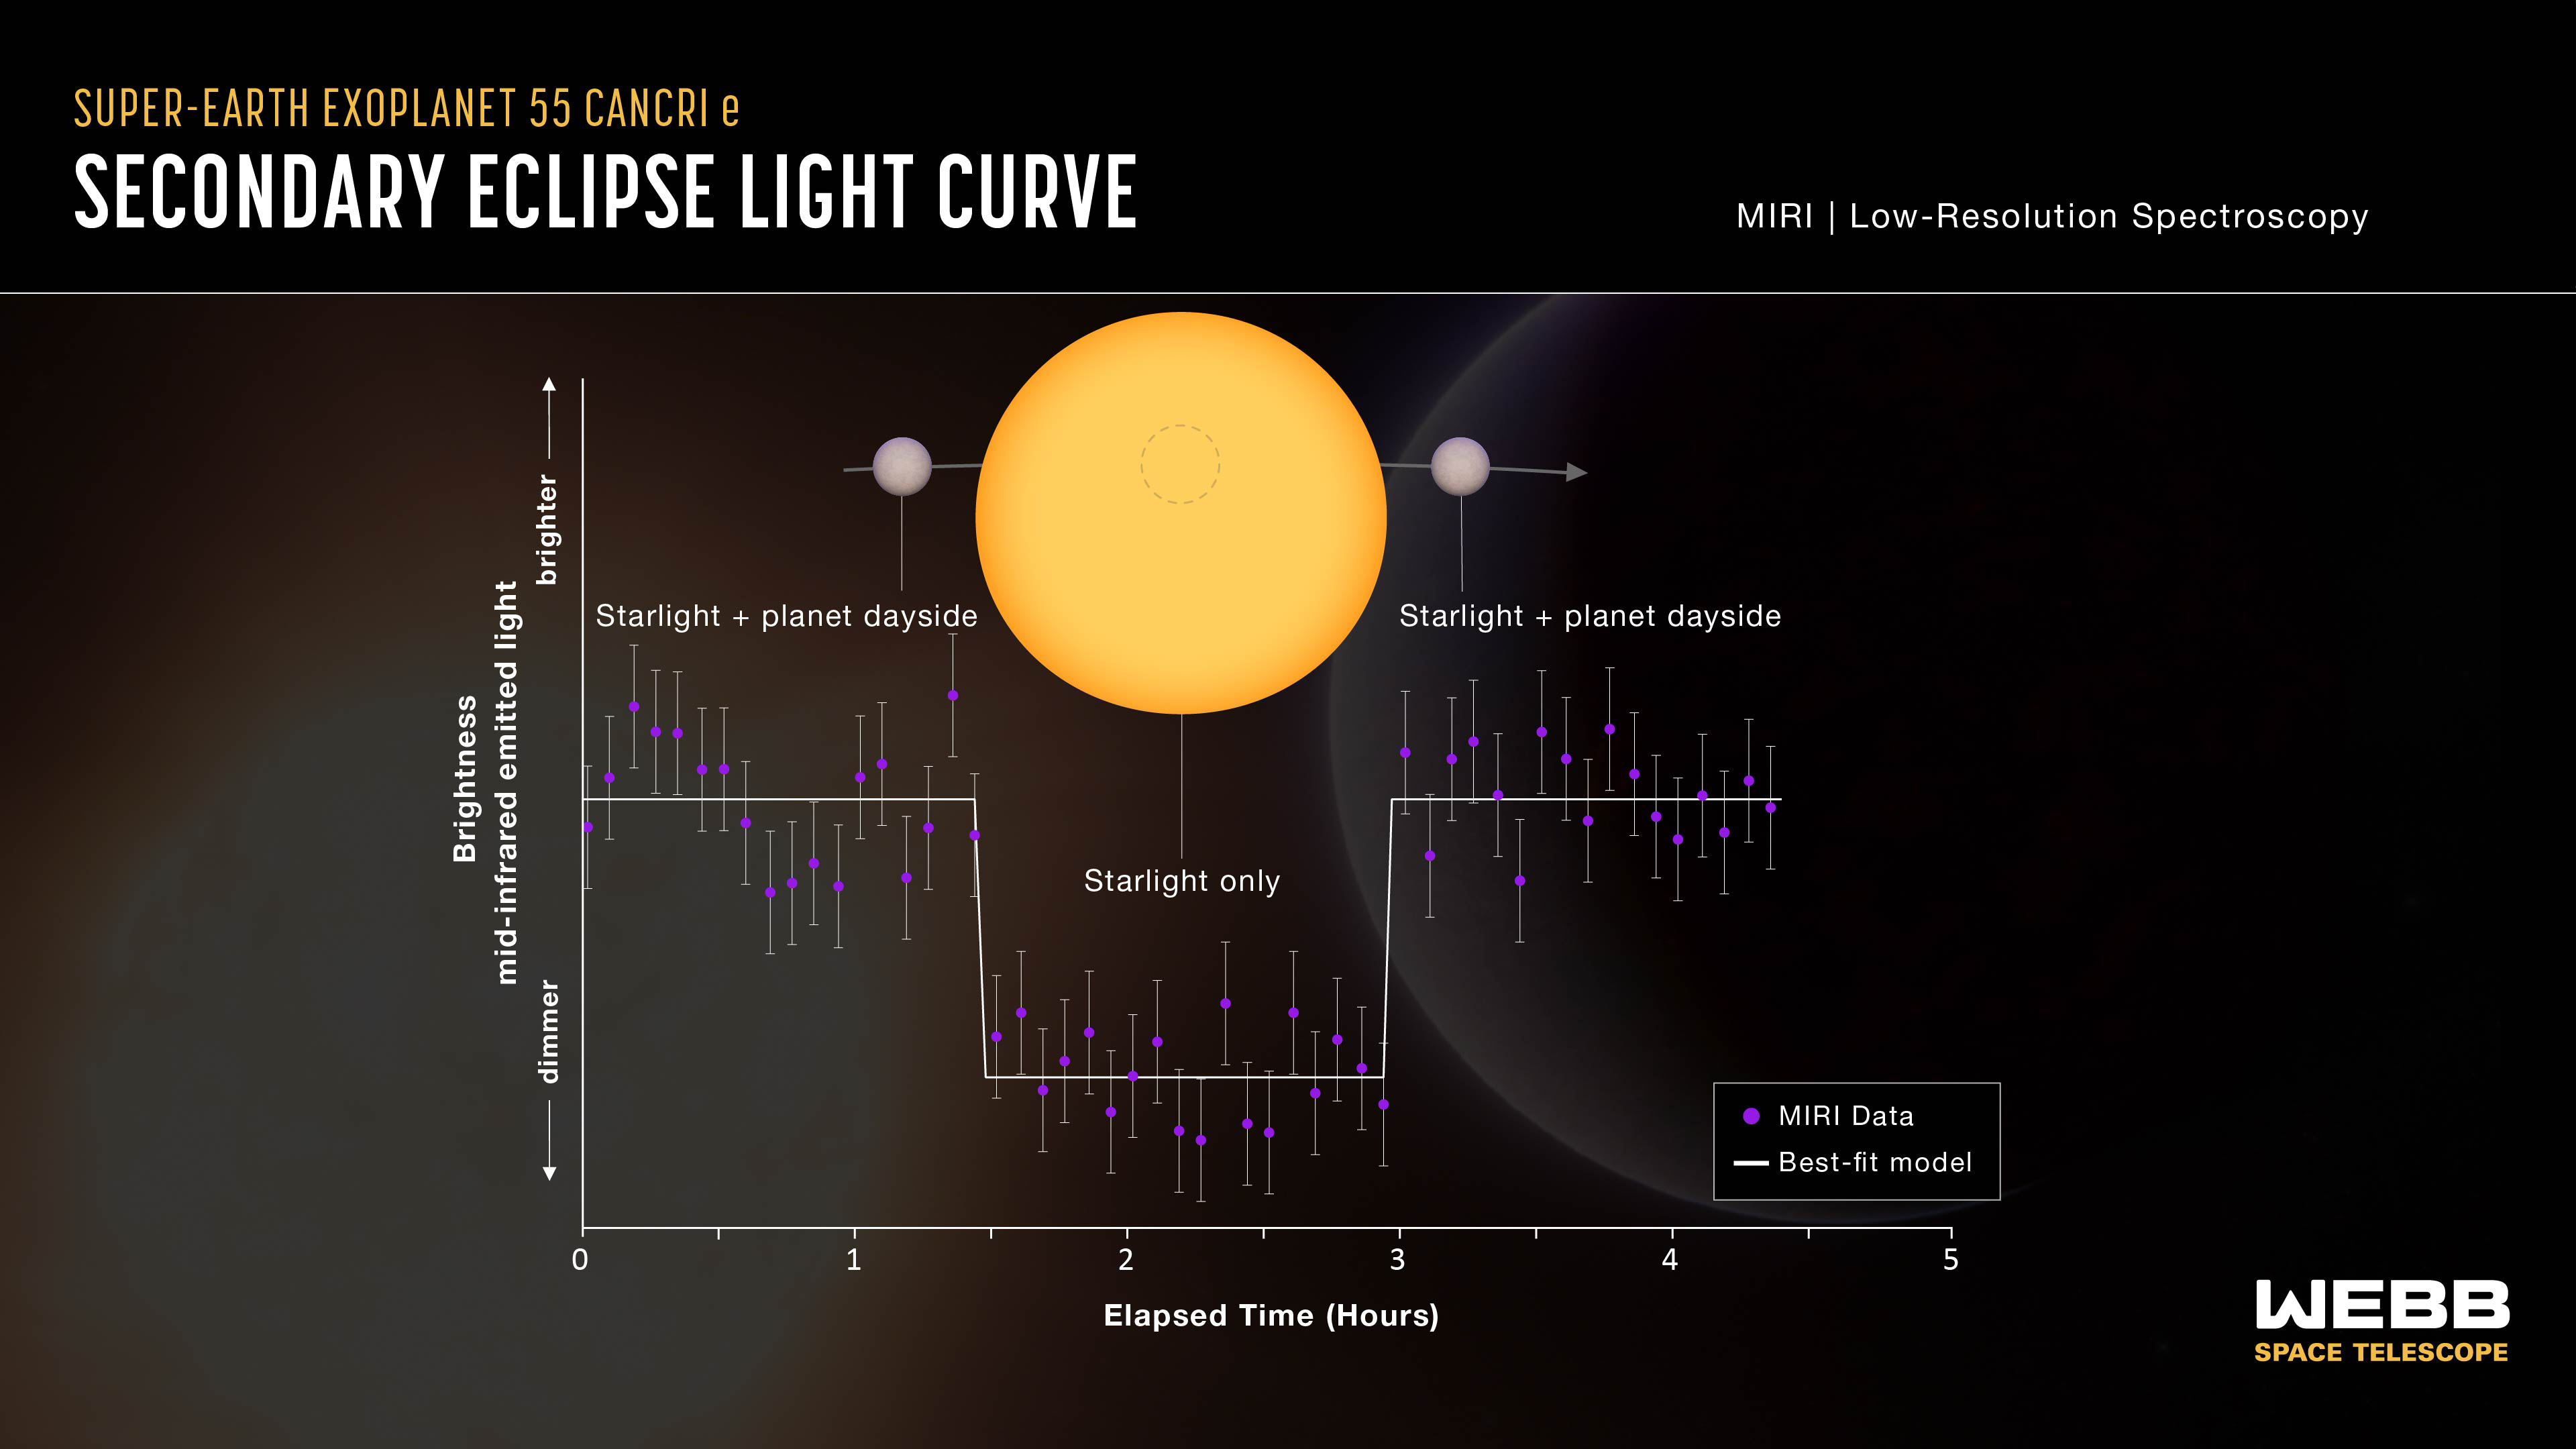

Super-Earth exoplanet 55 Cancri e (secondary eclipse lightcurve)

This lightcurve shows the change in brightness of the 55 Cancri system as the rocky planet 55 Cancri e, the closest of the five known planets in the system, moves behind the star. This phenomenon is known as a secondary eclipse.

When the planet is beside the star, the mid-infrared light emitted by both the star and the dayside of the planet reaches the telescope, and the system appears brighter. When the planet is behind the star, the light emitted by the planet is blocked and only the starlight reaches the telescope, causing the apparent brightness to decrease.

Astronomers can subtract the brightness of the star from the combined brightness of the star and planet to calculate how much infrared light is coming from the dayside of the planet. This is then used to calculate the dayside temperature and infer whether or not the planet has an atmosphere.

The graph shows data collected using the low-resolution spectroscopy mode on Webb’s Mid-Infrared Instrument (MIRI) in March 2023. Each of the purple data points shows the brightness of light ranging in wavelength from 7.5 to 11.8 microns, averaged over intervals of about five minutes. The grey line is the best fit, or model lightcurve that matches the data most closely. The decrease in brightness during the secondary eclipse is just 110 parts per million, or about 0.011 percent.

The temperature of the planet calculated from this observation is about 1800 kelvins (around 1500 degrees Celsius), which is significantly lower than would be expected if the planet has no atmosphere or only a thin rock-vapour atmosphere. This relatively low temperature indicates that heat is being distributed from the dayside to the nightside of the planet, possibly by a volatile-rich atmosphere.

Credit: NASA, ESA, CSA, J. Olmsted (STScI), A. Bello-Arufe (JPL)